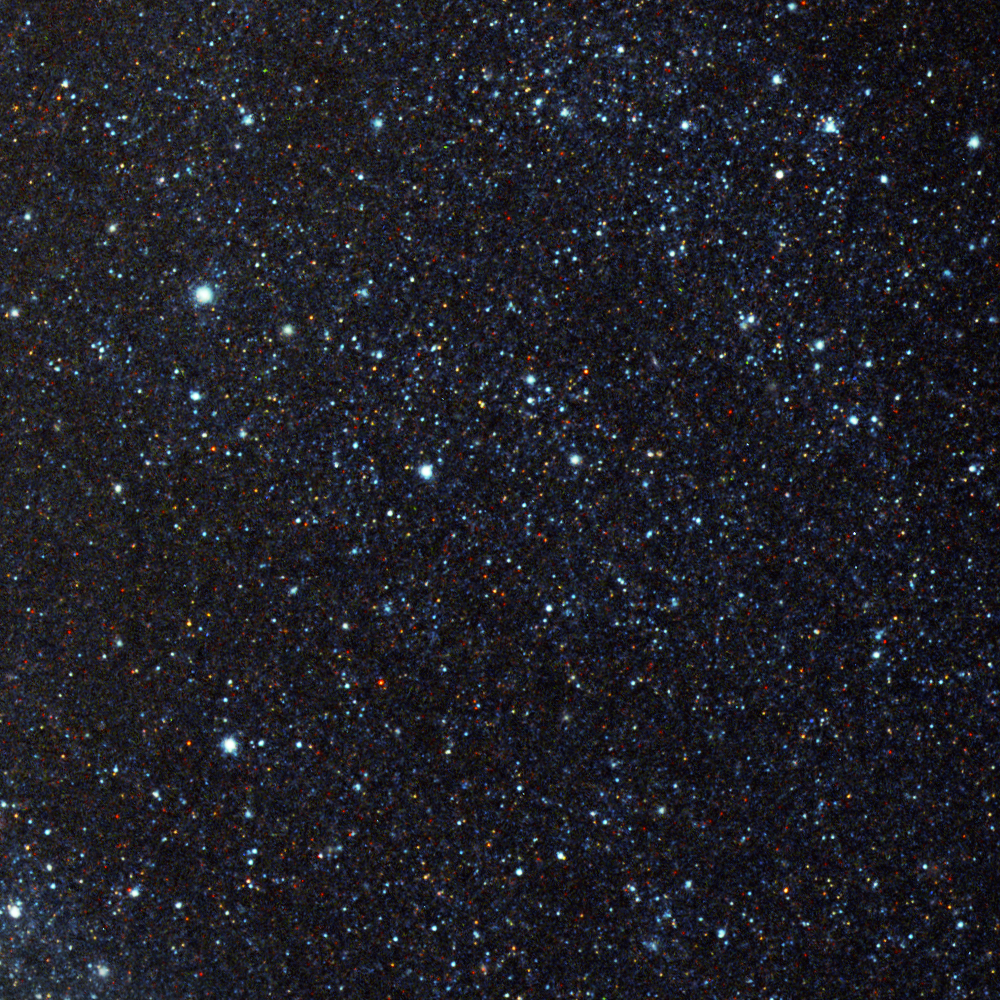

Pinwheel Galaxy close-up 3

A selection of some of the millions of individual stars visible in Messier 101 with Hubble's sharp vision. In total it is estimated that the Pinwheel galaxy contains about one trillion stars.

Credit: Image: European Space Agency & NASA
Acknowledgements:
Project Investigators for the original Hubble data: K.D. Kuntz (GSFC), F. Bresolin (University of Hawaii), J. Trauger (JPL), J. Mould (NOAO), and Y.-H. Chu (University of Illinois, Urbana)
Image processing: Davide De Martin (ESA/Hubble)
CFHT image: Canada-France-Hawaii Telescope/J.-C. Cuillandre/Coelum
NOAO image: George Jacoby, Bruce Bohannan, Mark Hanna/NOAO/AURA/NSF